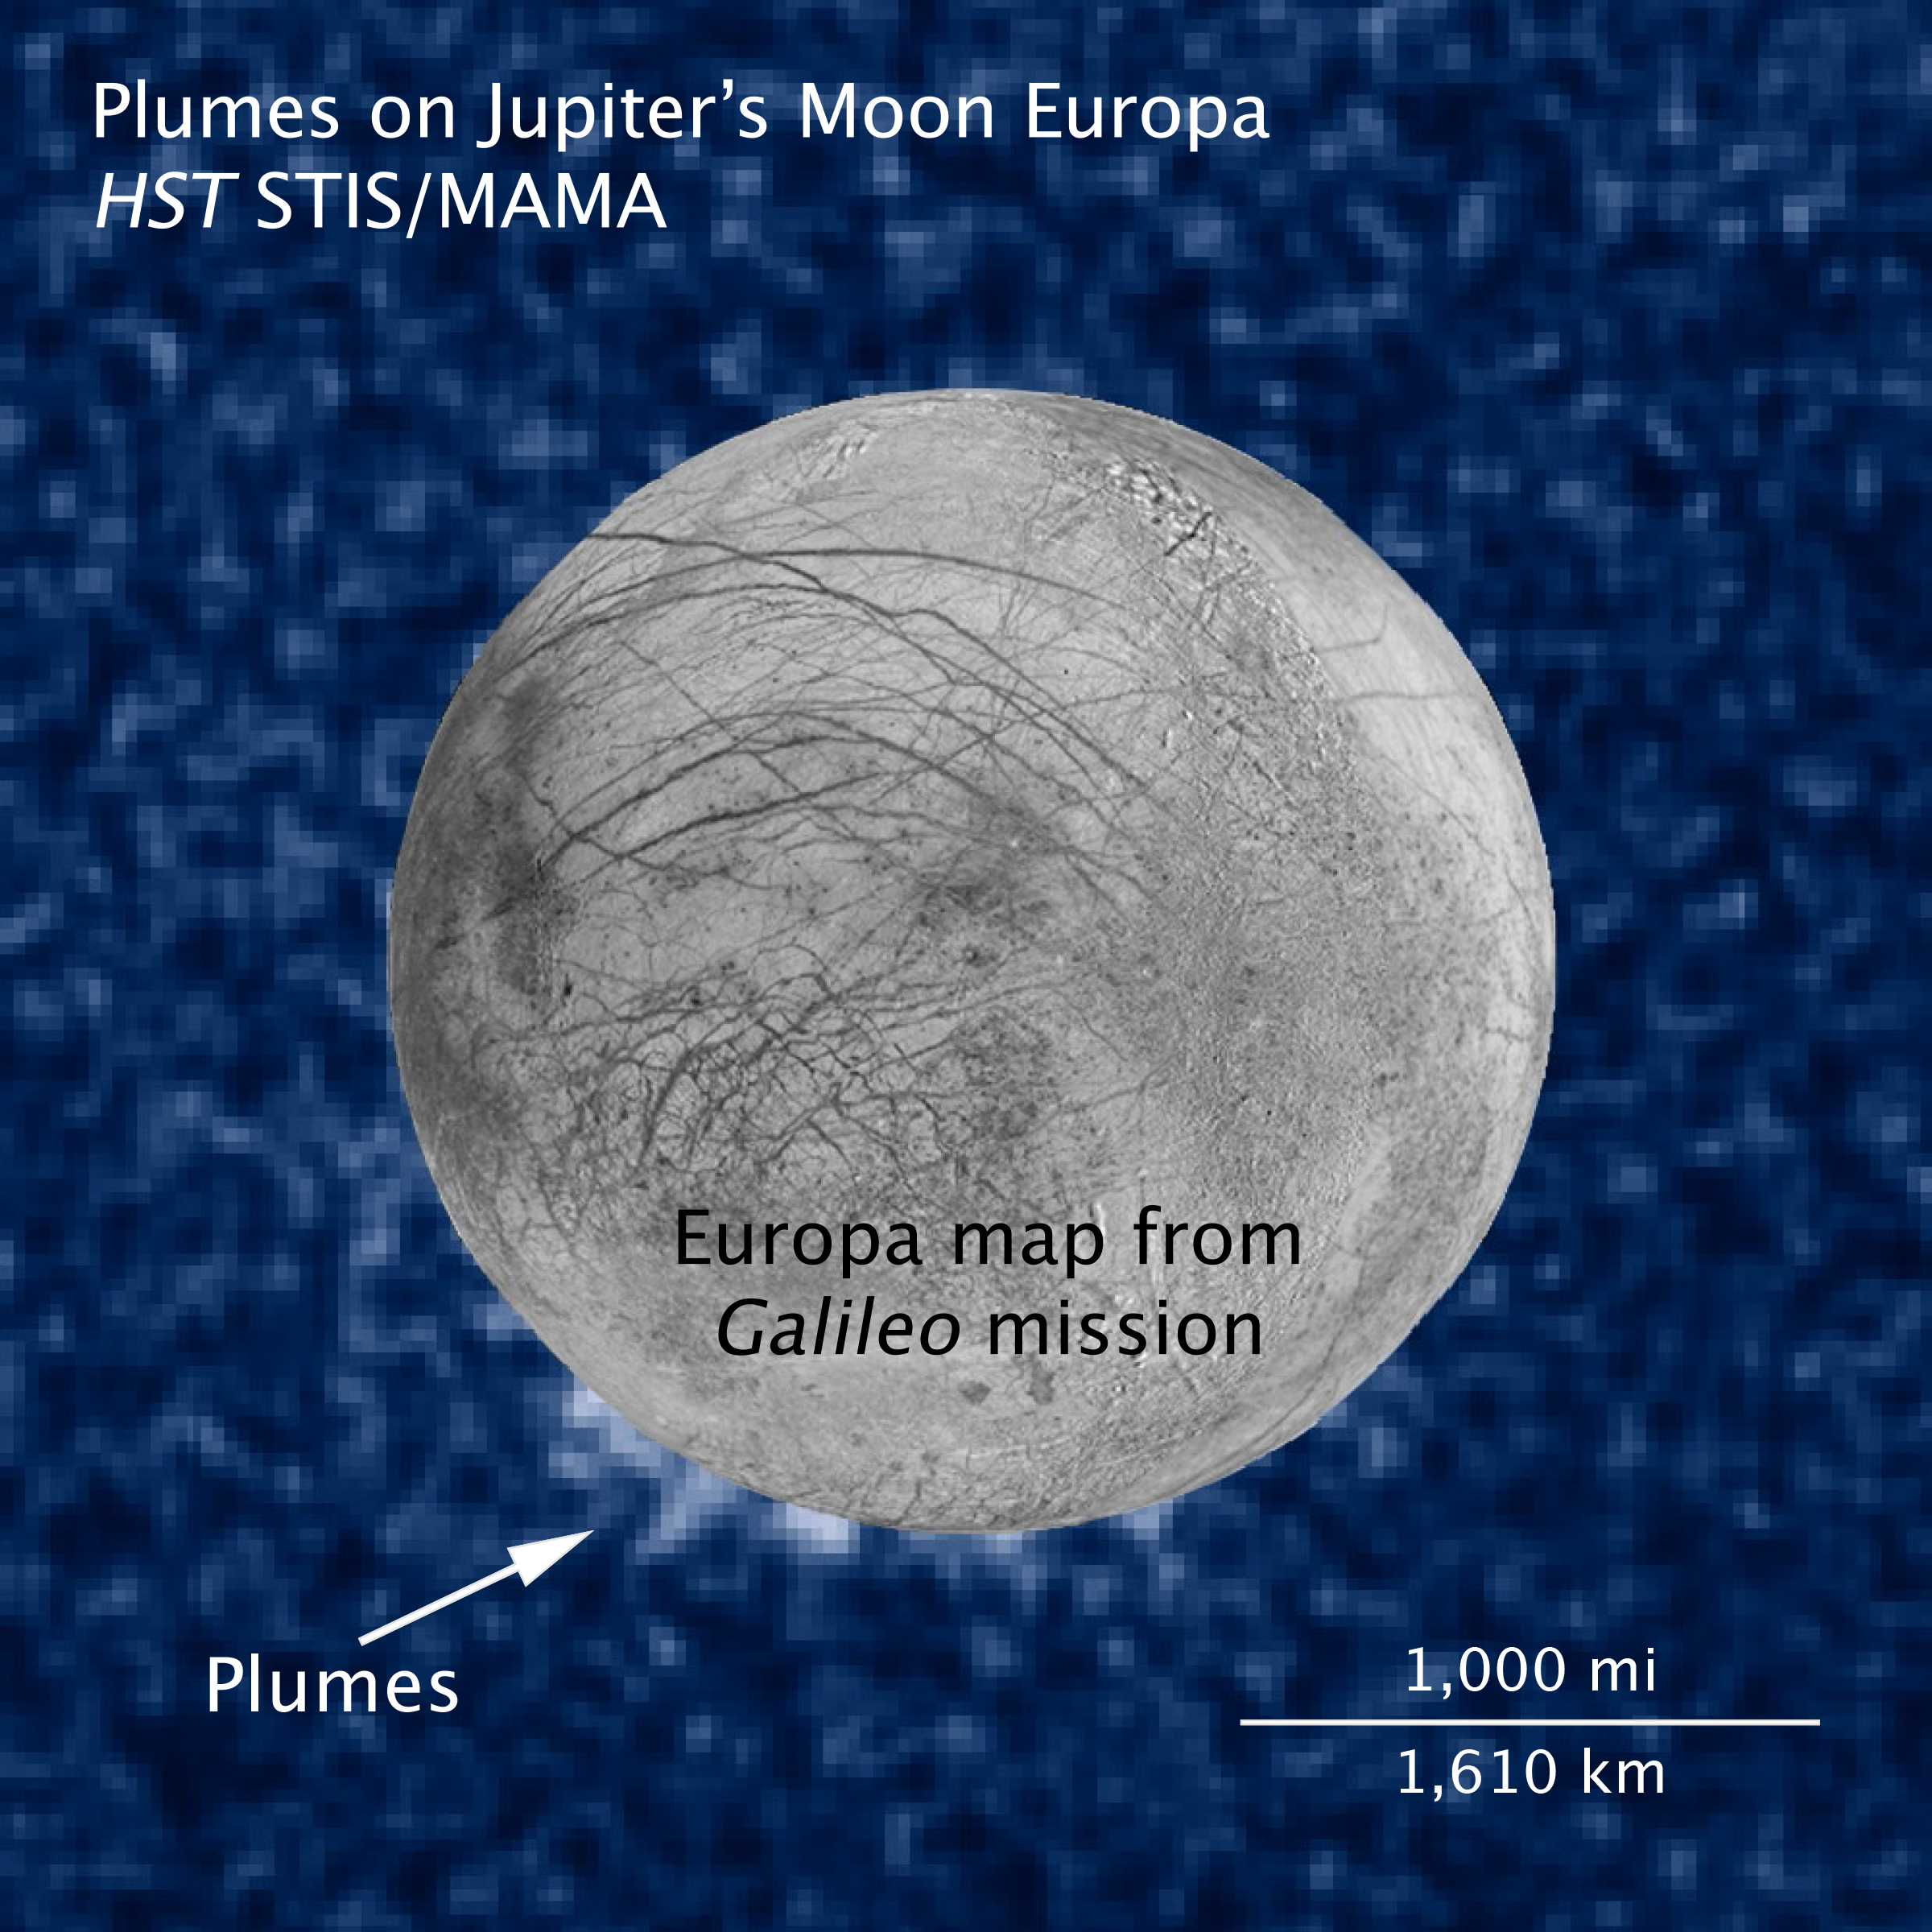

Photo composite of suspected water plumes on Europa (annotated)

This composite image shows suspected plumes of water vapour erupting at the 7 o'clock position off the limb of Jupiter's moon Europa. The plumes, photographed by Hubble’s Imaging Spectrograph, were seen in silhouette as the moon passed in front of Jupiter. Hubble's ultraviolet sensitivity allowed for the features, rising over 160 kilometres above Europa's icy surface, to be discerned. The water is believed to come from a subsurface ocean on Europa. The Hubble data were taken on January 26, 2014. The image of Europa, superimposed on the Hubble data, is assembled from data from the Galileo and Voyager missions.

Credit: NASA, ESA, W. Sparks (STScI), and the USGS Astrogeology Science Center